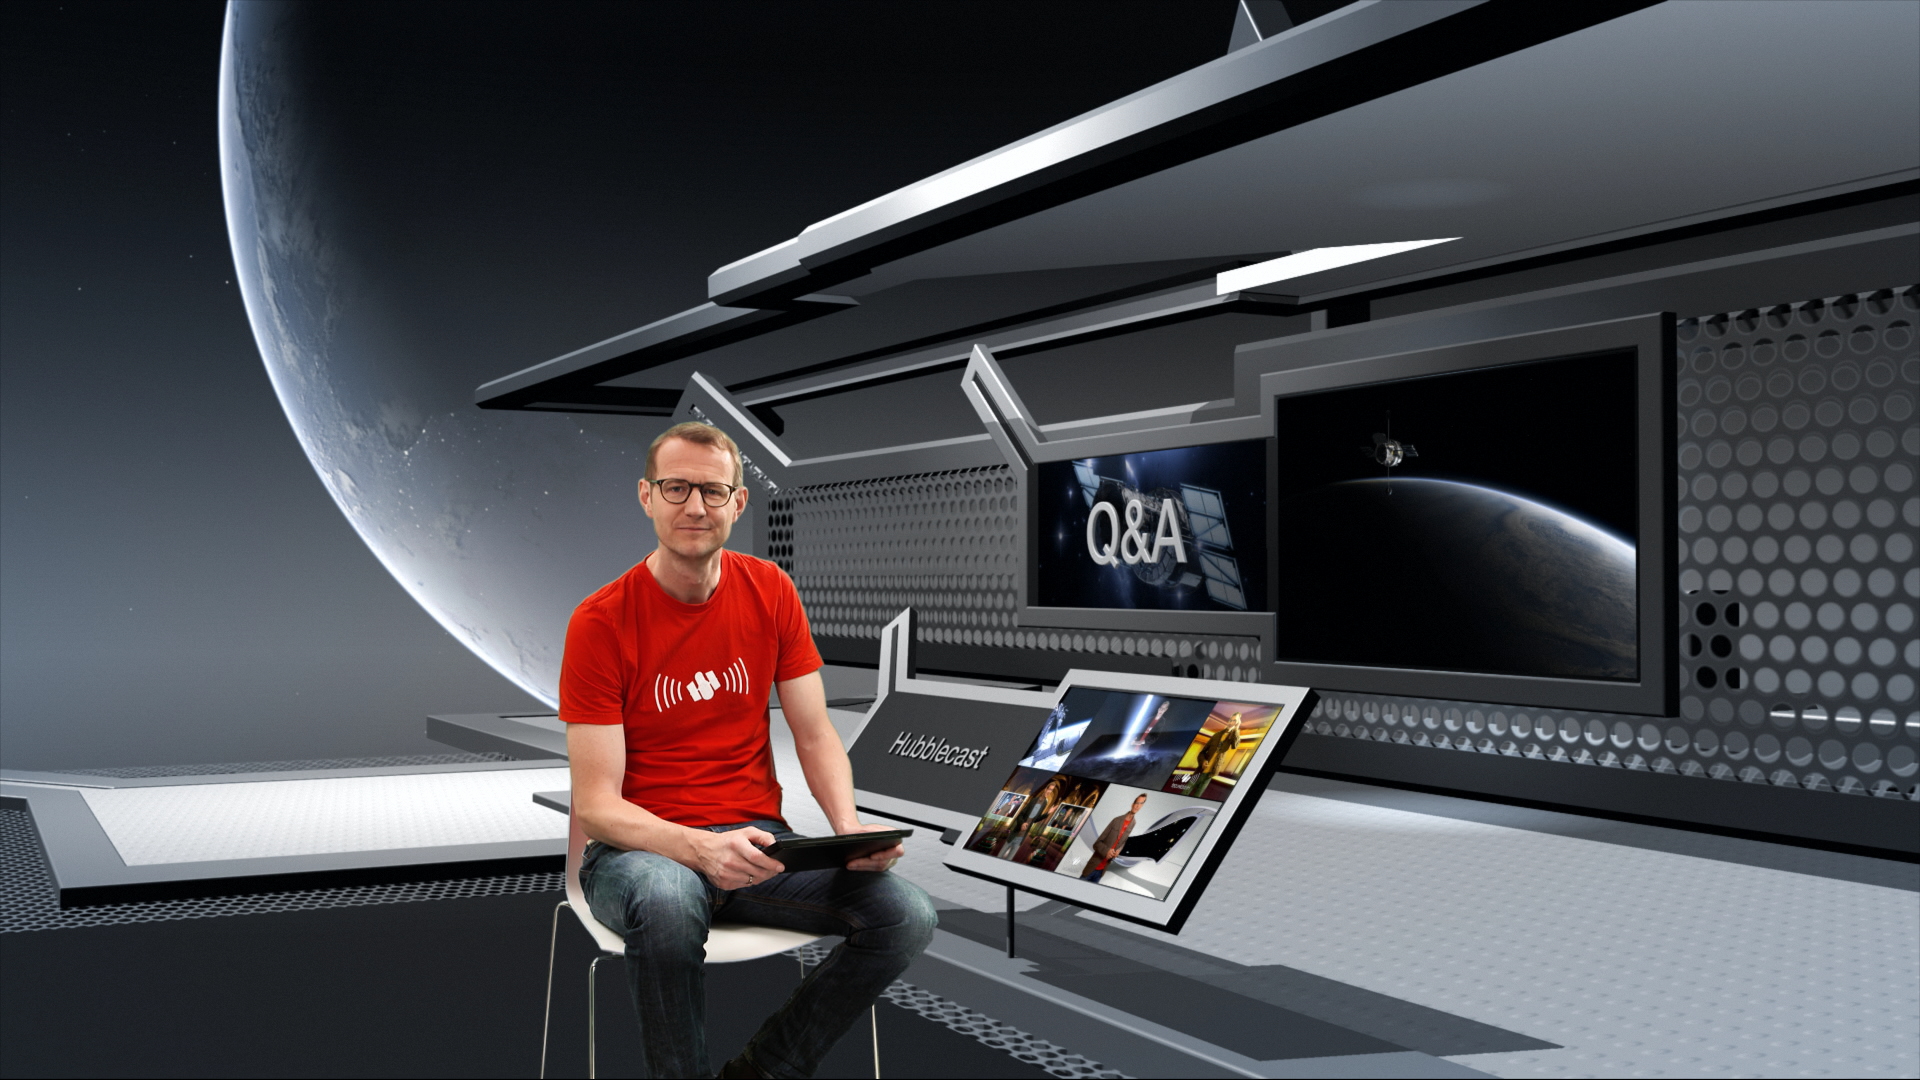

Screenshot from Hubblecast 78: Q&A with Dr J part 1

This image is a screenshot from Hubblecast 78: Q&A with Dr J part 1.

In this episode Dr J answers a selection of questions from the public about Hubble. These range from where Hubble is and how it avoids crashing into space debris, to what the future holds for Hubble, how its life will end, and what will take its place.

Credit: NASA, ESA/Hubble